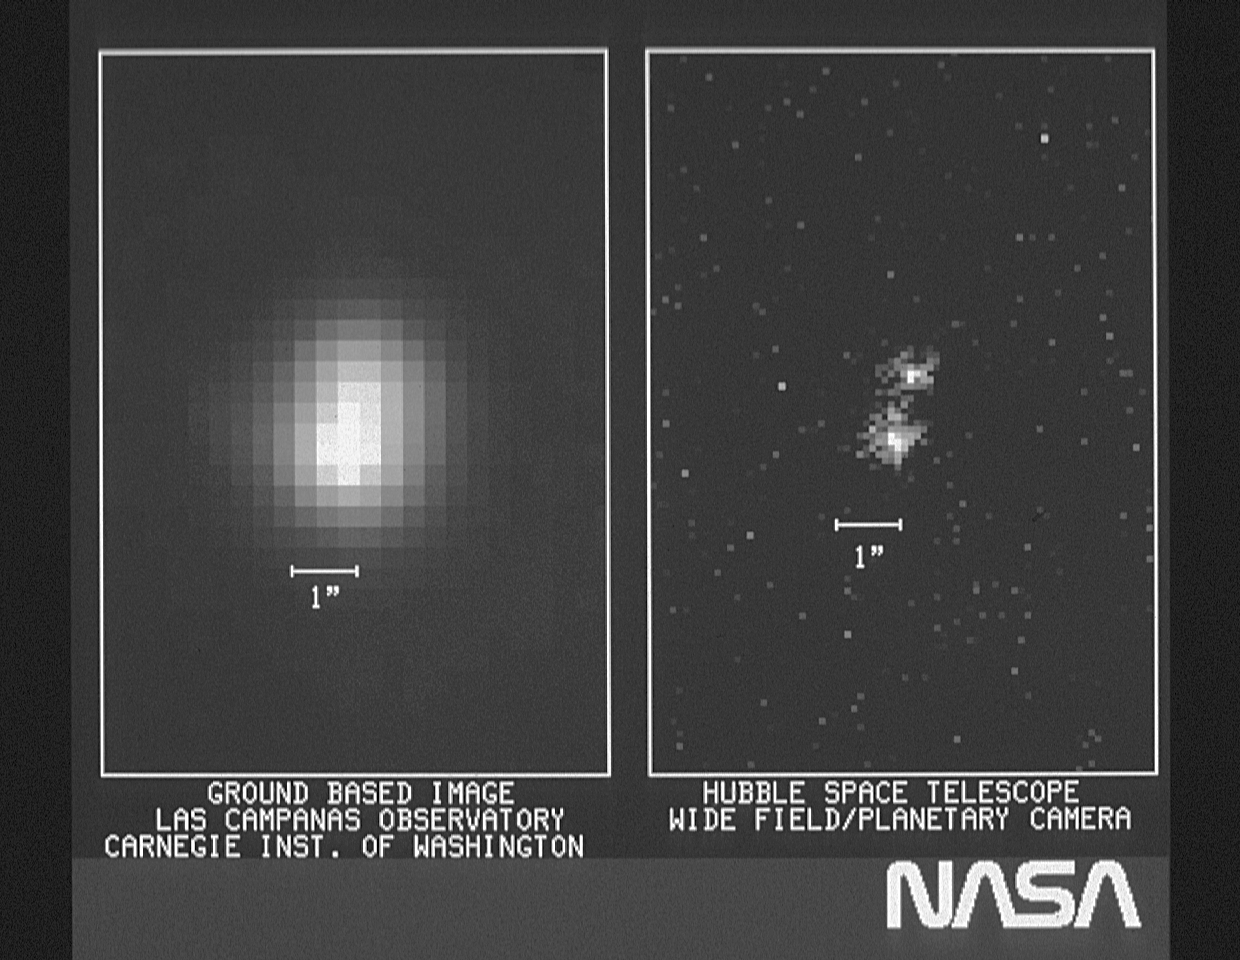

The resolving power of the Hubble Space Telescope

The image on the right is a portion of the first image returned by the Wide Field Planetary Camera on the Hubble Space Telescope. On the left is a ground based image of the same area of the sky. The object shown in these images is a double star: the pair of stars is well separated in the HST image but blurred together in the ground based image.

Credit: NASA/ESA